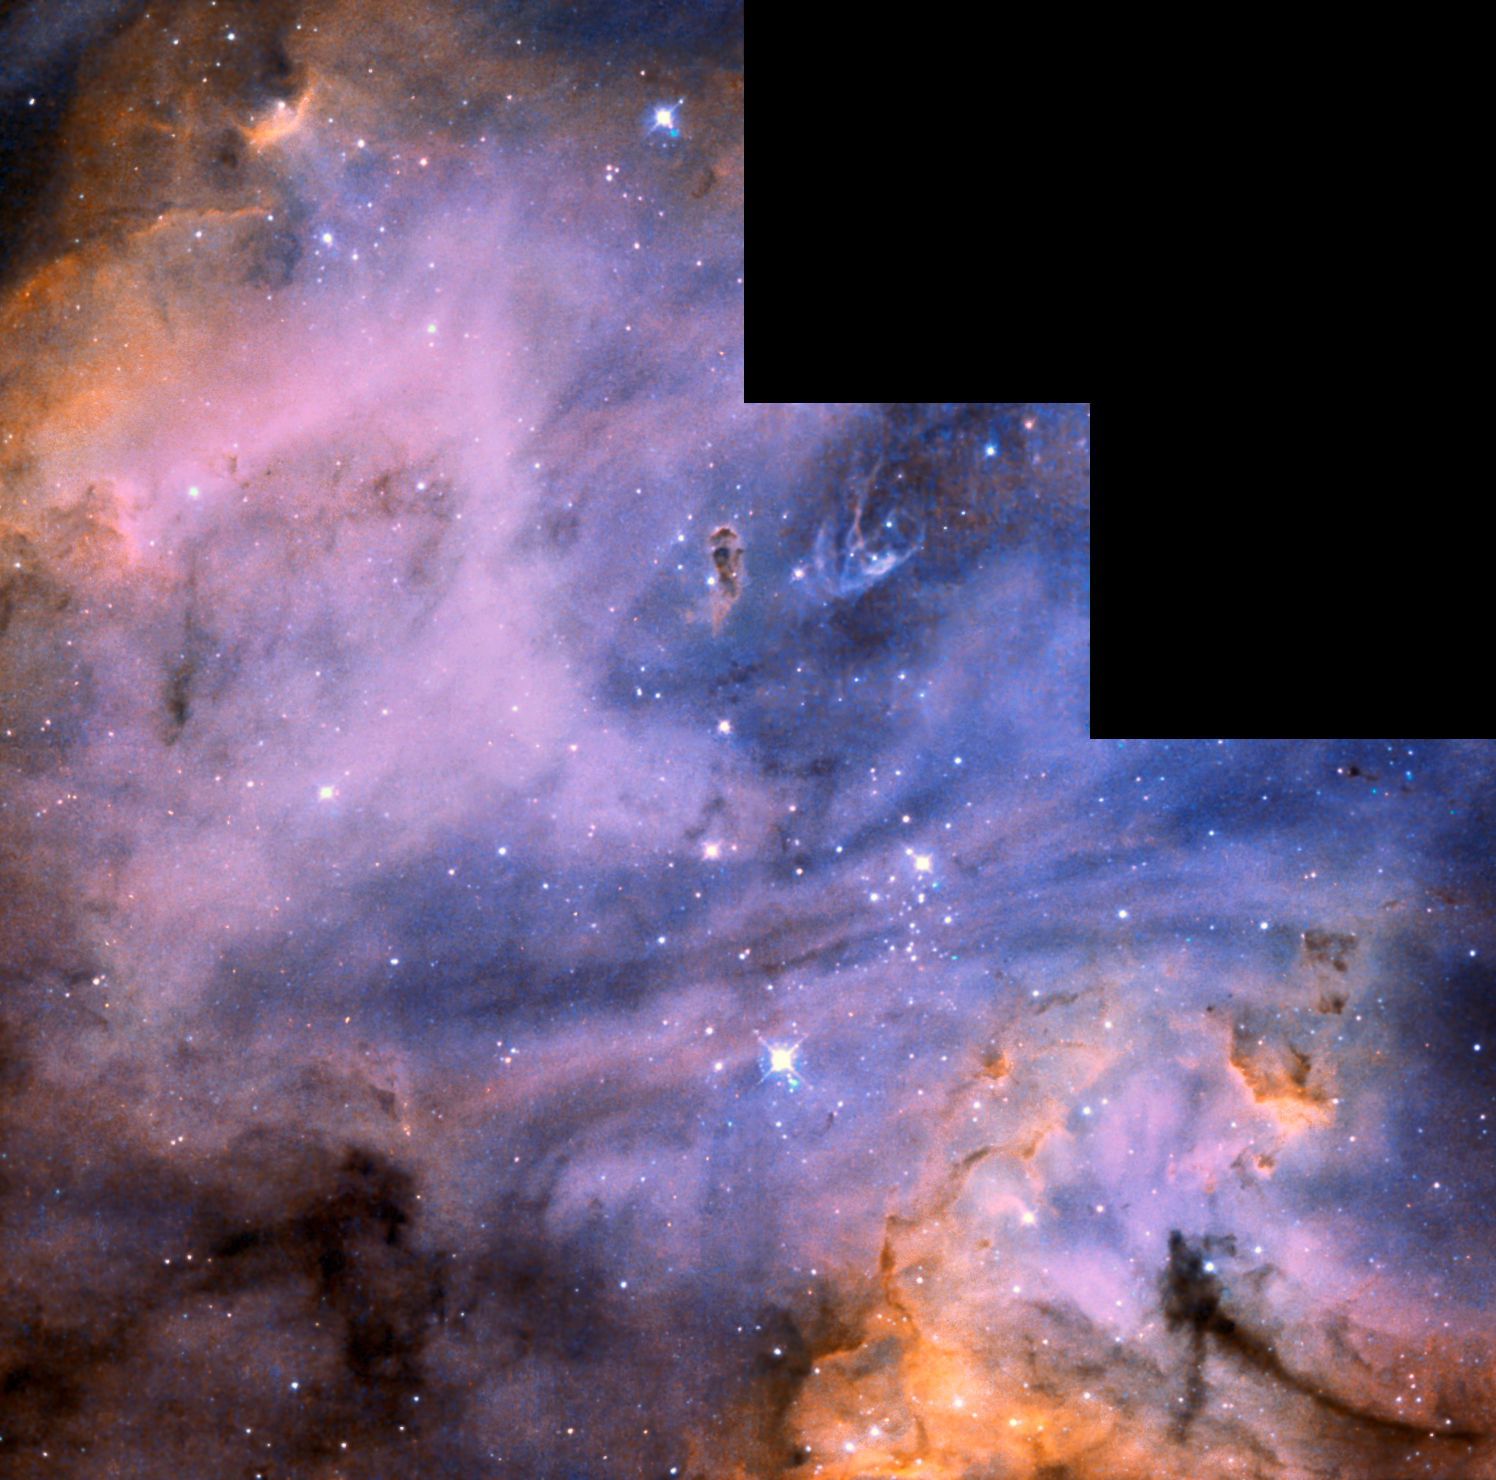

N 180B in the Large Magellanic Cloud

This active region of star formation in the Large Magellanic Cloud (LMC), as photographed by NASA/ESA Hubble Space Telescope, unveils wispy clouds of hydrogen and oxygen that swirl and mix with dust on a canvas of astronomical size. The LMC is a satellite galaxy of the Milky Way.

This particular region within the LMC, referred to as N 180B, contains some of the brightest known star clusters. The hottest blue stars can be brighter than a million of our Suns. Their intense energy output generates not only harsh ultraviolet radiation but also incredibly strong stellar "winds" of high-speed, charged particles that blow into space. The ultraviolet radiation ionizes the interstellar gas and makes it glow, while the winds can disperse the interstellar gas across tens or hundreds of light-years. Both actions are evident in N 180B.

Also visible etched against the glowing hydrogen and oxygen gases are 100 light-year-long dust streamers that run the length of the nebula, intersecting the core of the cluster near the centre of the image. Perpendicular to the direction of the dark streamers, bright orange rims of compact dust clouds appear near the bottom right of and top left corners of the image. These dark concentrations are on the order of a few light-years in size. Also visible among the dust clouds are so-called "elephant trunk" stalks of dust. If the pressure from the nearby stellar winds is great enough to compress this material and cause it to gravitationally contract, star formation might be triggered in these small dust clouds. These dust clouds are evidence that this is still a young star-formation region.

This image was taken with Hubble's Wide Field Planetary Camera 2 in 1998 using filters that isolate light emitted by hydrogen and oxygen gas. To create a colour composite, the data from the hydrogen filter were colorized red, the oxygen filter were colorized blue, and a combination of the two filters averaged together was colorized green. The amalgamation yields pink and orange hydrogen clouds set amid a field of soft blue oxygen gas. Dense dust clouds block starlight and glowing gas from our view point.

Credit: NASA, ESA, and the Hubble Heritage Team (STScI/AURA)